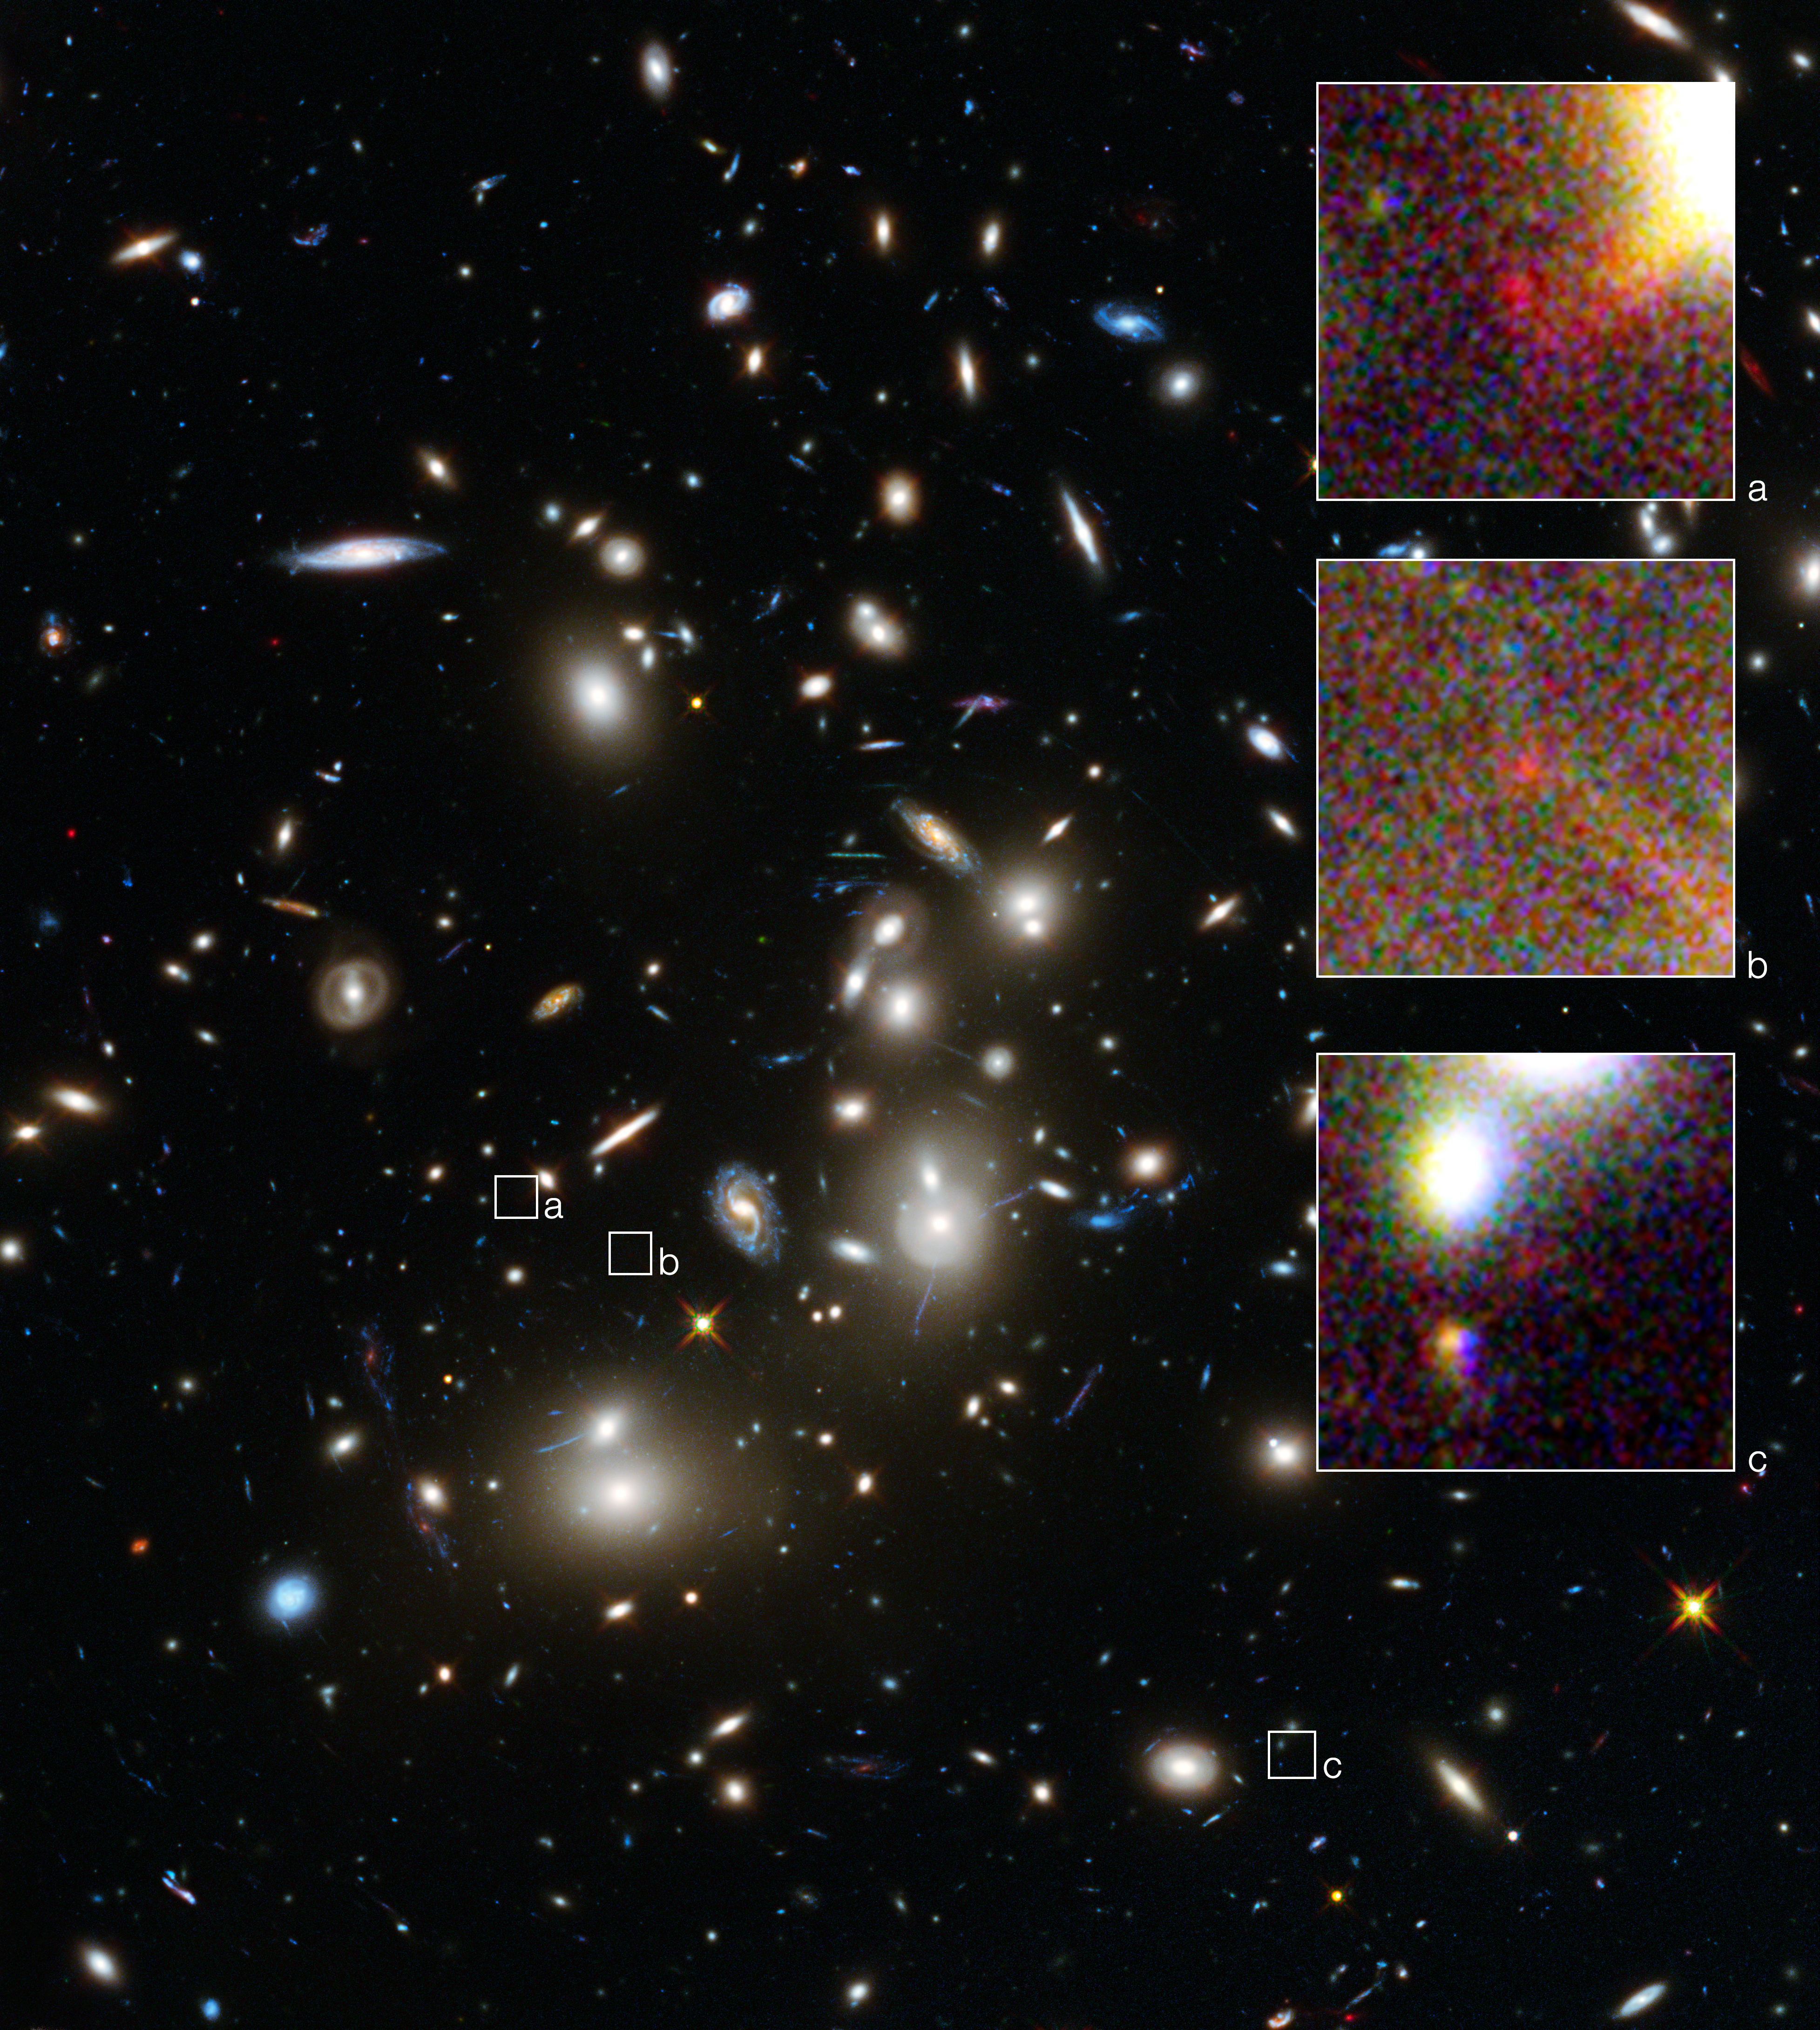

Abell 2744 and three images of a distant galaxy

This is a NASA/ESA Hubble Space Telescope image of the huge galaxy cluster Abell 2744, taken using the Wide Field Camera 3 and Advanced Camera for Surveys.

The three annotated areas show three images of a single, very distant, galaxy whose light has taken 13 billion years to reach us. The galaxy has been magnified and multiplied by the cluster's effect on the space-time around it.

By measuring the angular separations between the three magnified images of the galaxy a team of astronomers were able to further constrain their measurement of the galaxy's distance from Earth. Much like using your camera to focus on an object and then reading its distance from you on the lens focus ring.

As a result, this is possibly the most reliable distance measurement yet for an object that existed in the Universe's formative years.

Credit: NASA, ESA Acknowledgement: A. Zitrin (California Institute of Technology, USA)